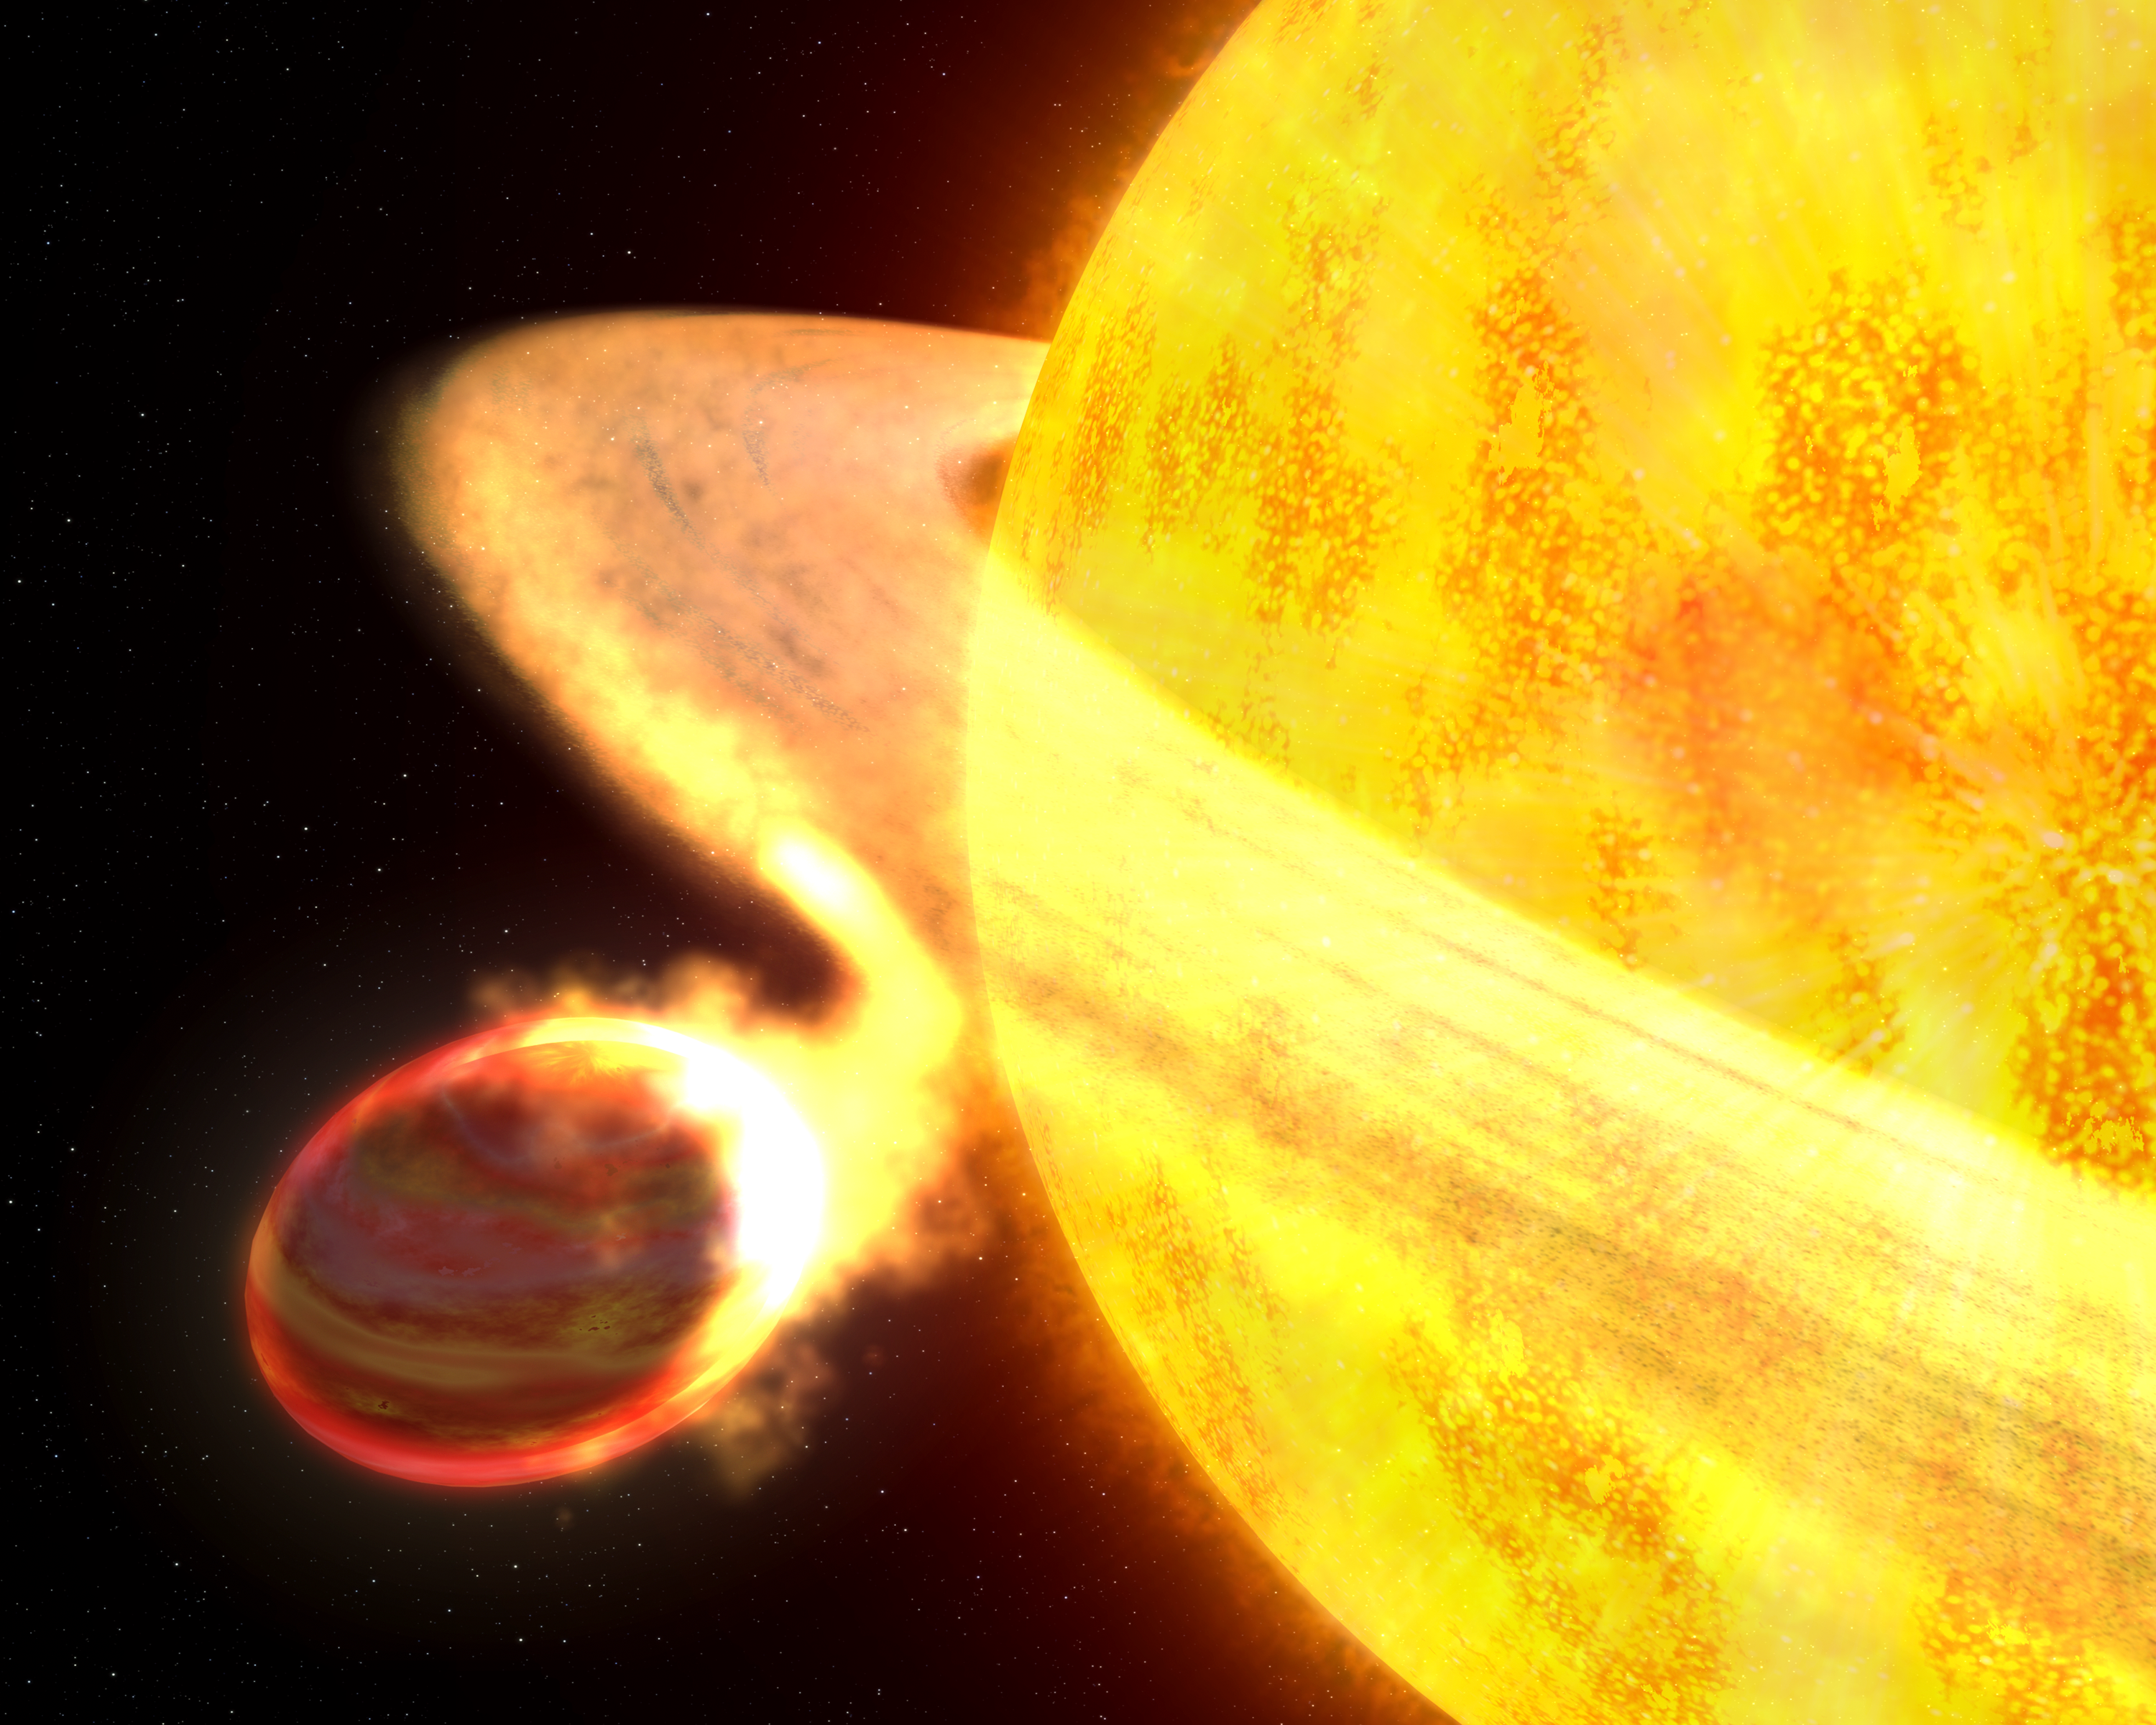

Star devouring a planet (artist's impression)

This is an artist's concept of the exoplanet WASP-12b. It is the hottest known planet in the Milky Way galaxy, and potentially the shortest lived. The planet is only 3.2 million kilometres from its sunlike parent star — a fraction of Earth's distance from the Sun. Gravitational tidal forces from the star stretch the planet into an egg shape. The planet is so hot that it has puffed up to the point where its outer atmosphere spills onto the star. An accretion bridge streams toward the star and material is smeared into a swirling disc. The planet may be completely devoured by the star in 10 million years. The planet is too far away for the Hubble Space Telescope to photograph, but this interpretation is based in part on analysis of Hubble spectroscopic and photometric data.

Credit: NASA, ESA, and G. Bacon (STScI). Science Credit: NASA, ESA, and C. Haswell (The Open University, UK)